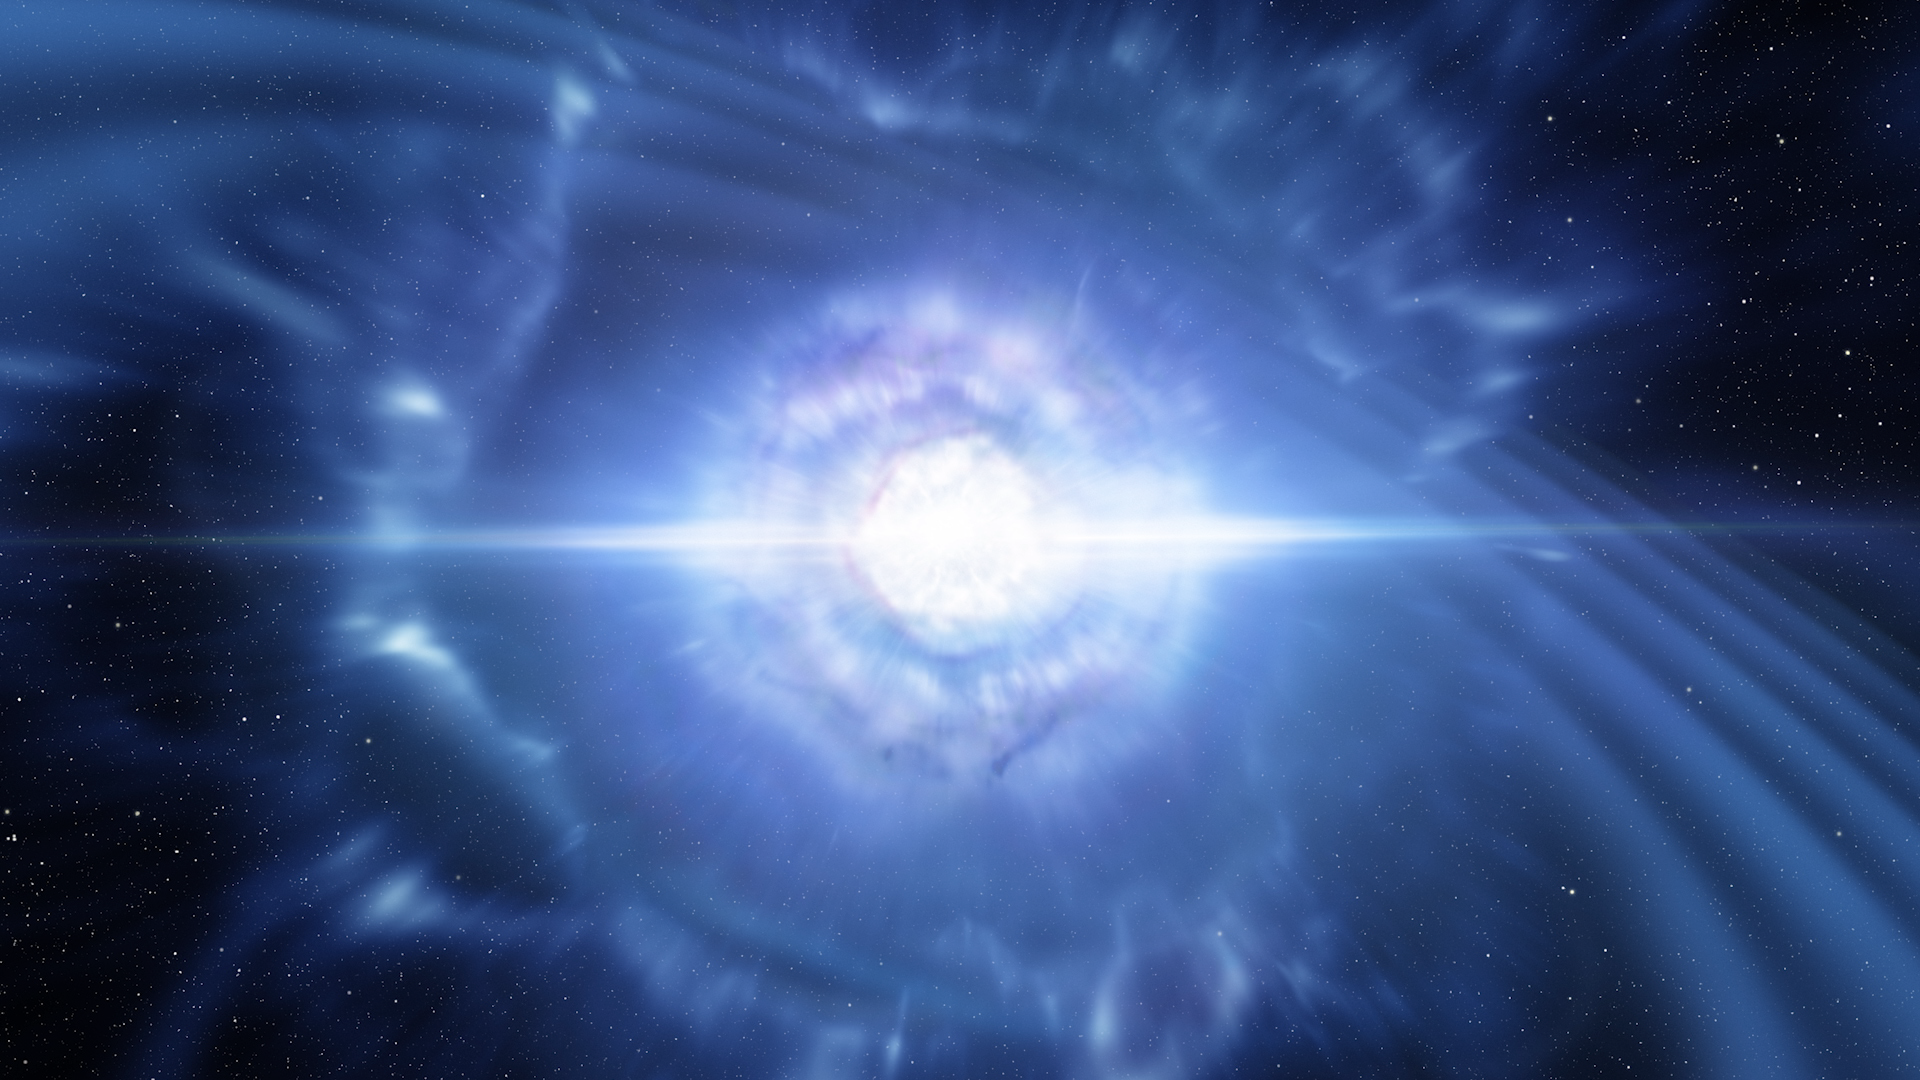

Still from Hubblecast 103: Hubble observes source of gravitational waves for the first time

This is a still from Hubblecast 103.

Credit: ESA/Hubble, NASA